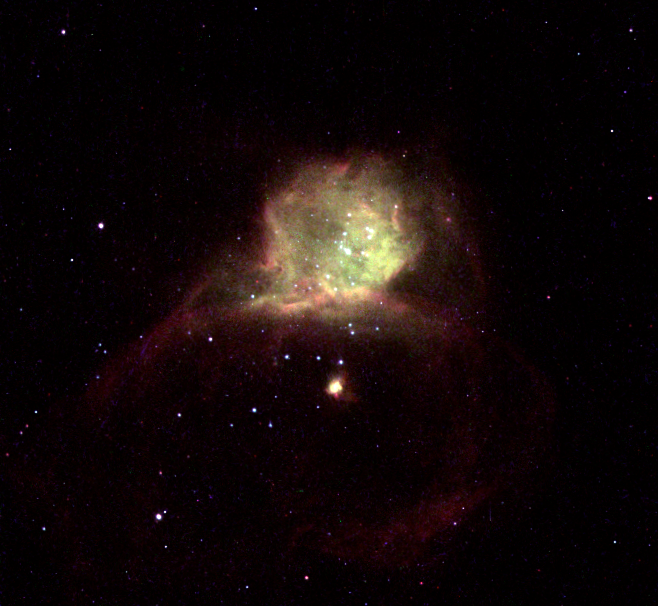

Hubble-X in galaxy NGC 6822

The saying 'X' marks the spot holds true in this NASA/ESA Hubble Space Telescope (HST) image where Hubble-X marks the location of a dramatic burst of star formation, very much like the Orion Nebula in our Milky Way galaxy, but on a vastly greater scale.

Hubble-X is a glowing gas cloud, one of the most active star-forming regions within galaxy NGC 6822. The name Hubble-X does not refer to the shape of the gas cloud, but rather is derived from a catalog of objects in this particular galaxy.

Credit: NASA/ESA and The Hubble Heritage Team (STScI/AURA)